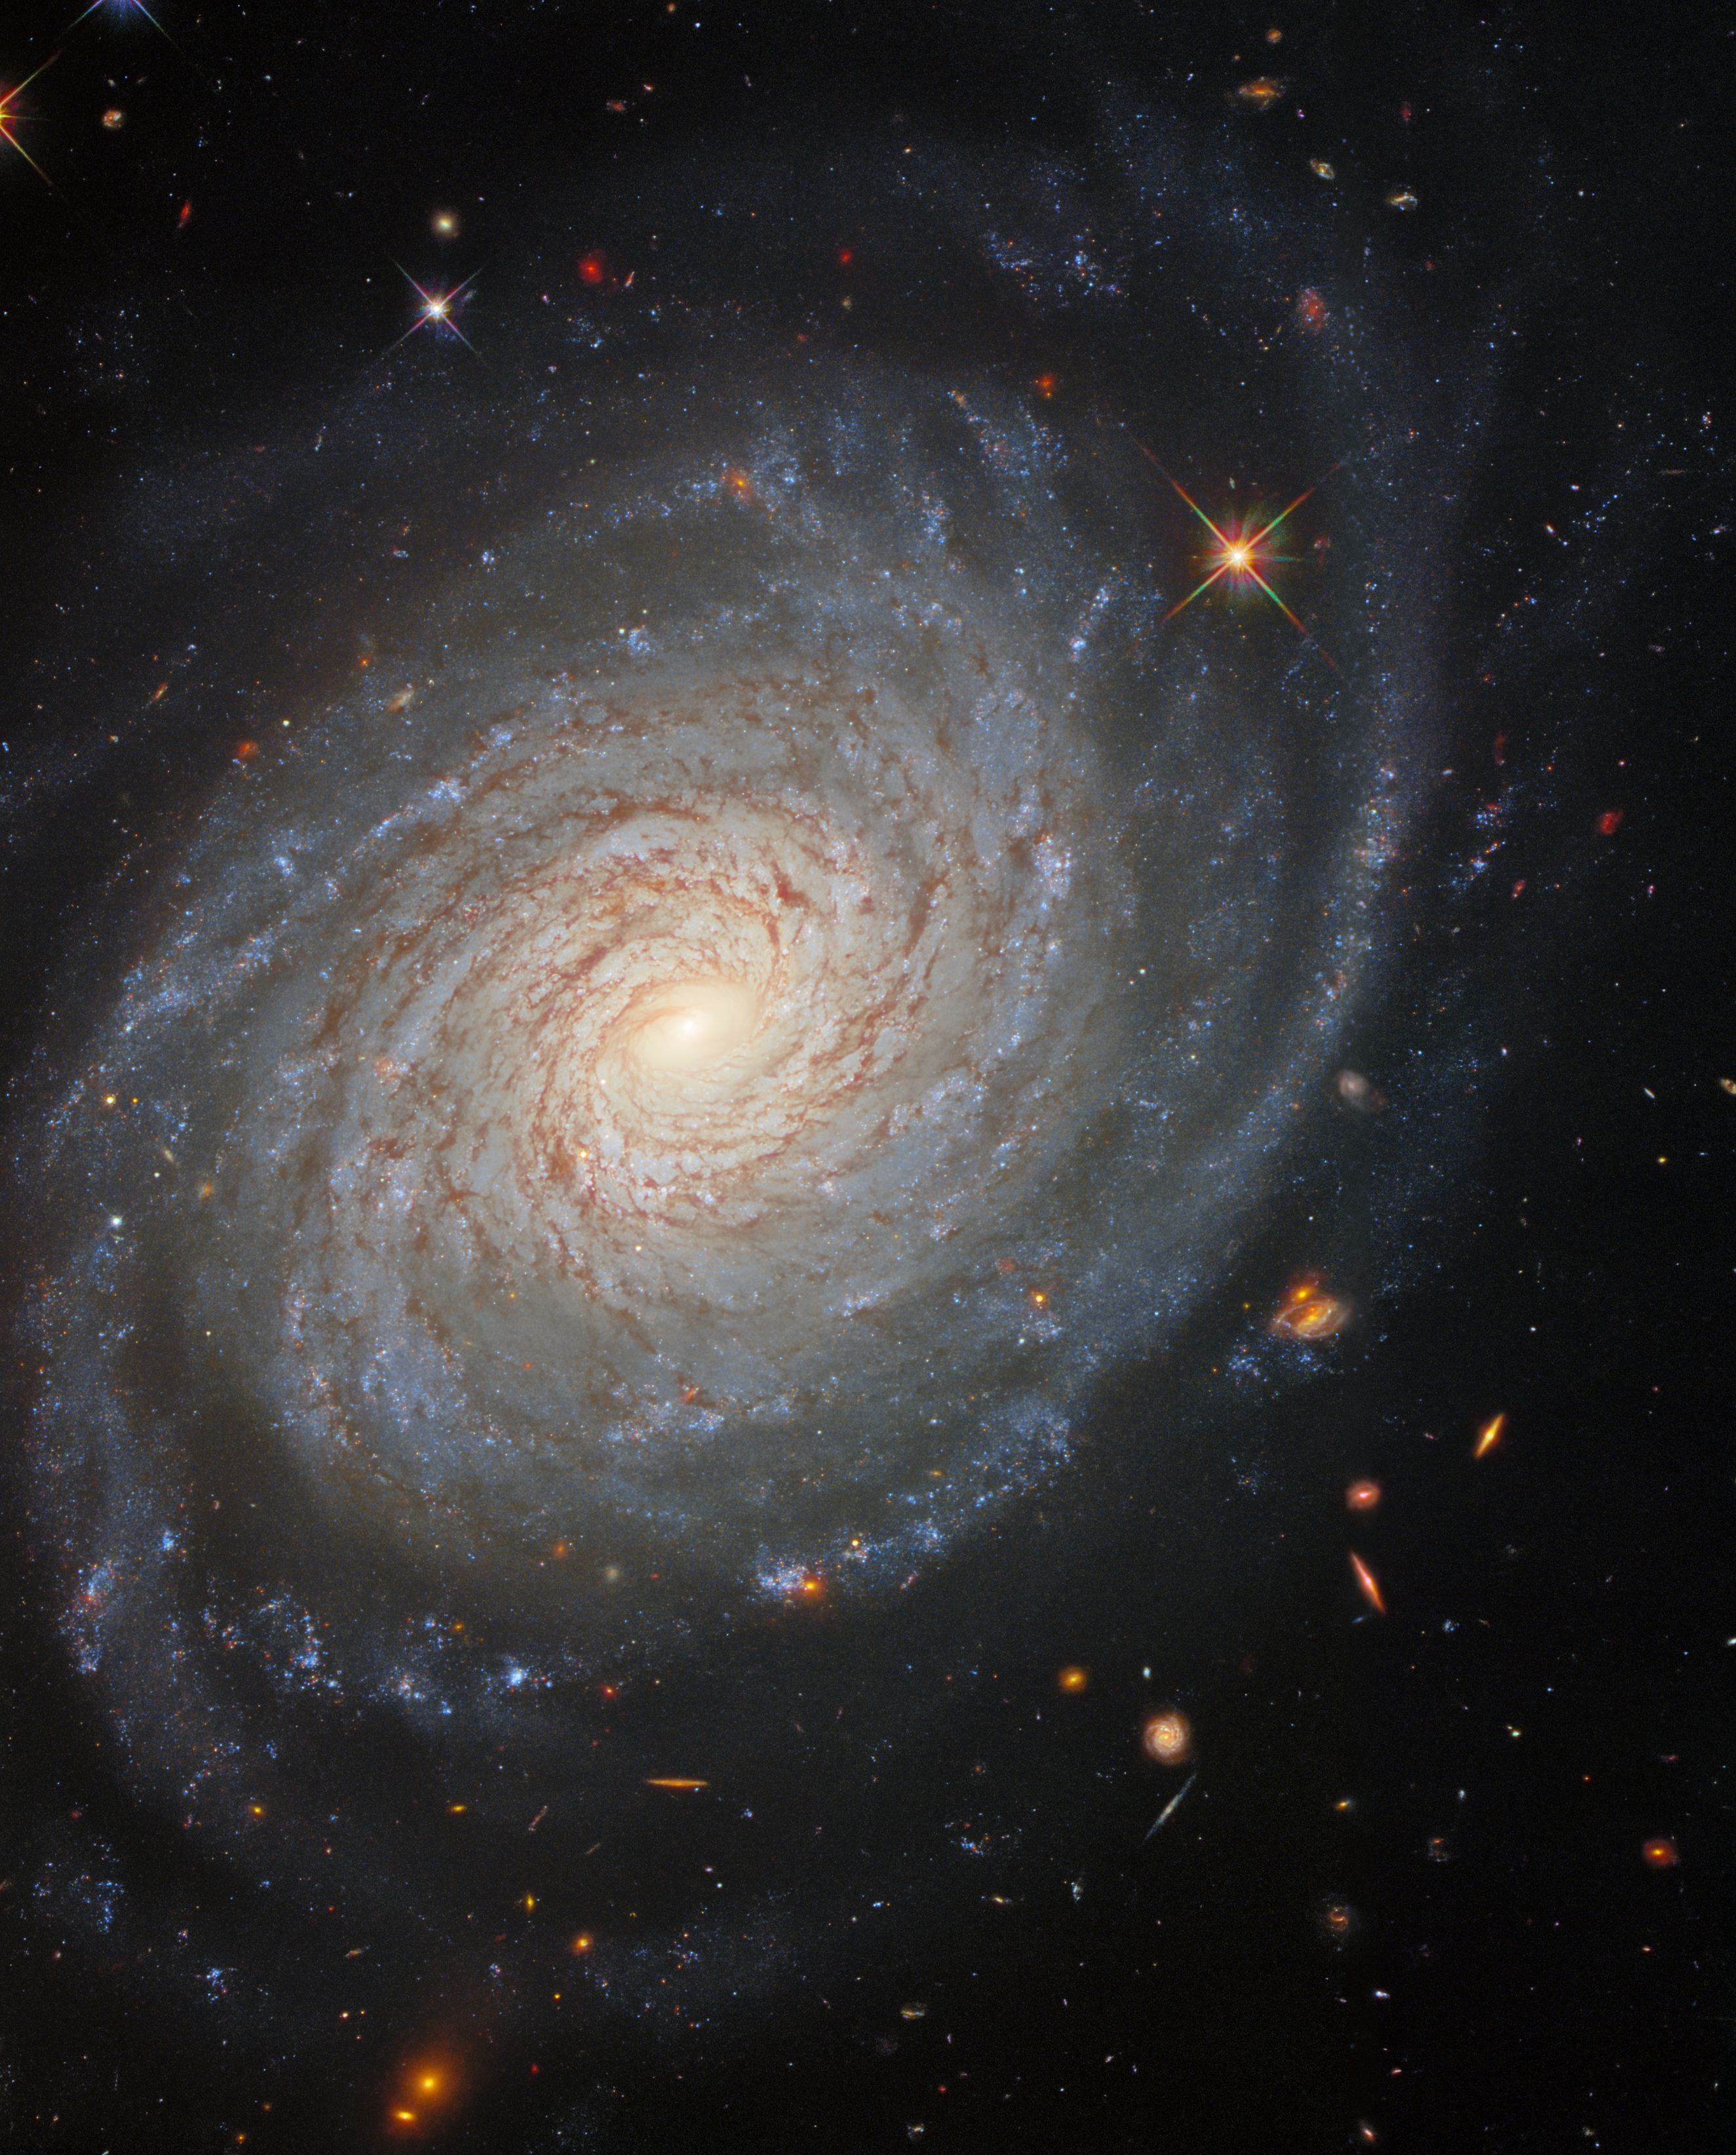

Galactic Tranquility

The lazily winding spiral arms of the spectacular galaxy NGC 976 fill the frame of this image from the NASA/ESA Hubble Space Telescope. This spiral galaxy lies around 150 million light-years from the Milky Way in the constellation Aries. Despite its tranquil appearance, NGC 976 has played host to one of the most violent astronomical phenomena known — a supernova explosion. These cataclysmicly violent events take place at the end of the lives of massive stars, and can outshine entire galaxies for a short period. While supernovae mark the deaths of massive stars, they are also responsible for the creation of heavy elements that are incorporated into later generations of stars and planets.

Supernovae are also a useful aid for astronomers who measure the distances to faraway galaxies. The amount of energy thrown out into space by supernova explosions is very uniform, allowing astronomers to estimate their distances from how bright they appear to be when viewed from Earth. This image — which was created using data from Hubble’s Wide Field Camera 3 — comes from a large collection of Hubble observations of nearby galaxies which host supernovae as well as a pulsating class of stars known as Cepheid variables. Both Cepheids and supernovae are used to measure astronomical distances, and galaxies containing both objects provide useful natural laboratories where the two methods can be calibrated against one another.

Credit: ESA/Hubble & NASA, D. Jones, A. Riess et al.